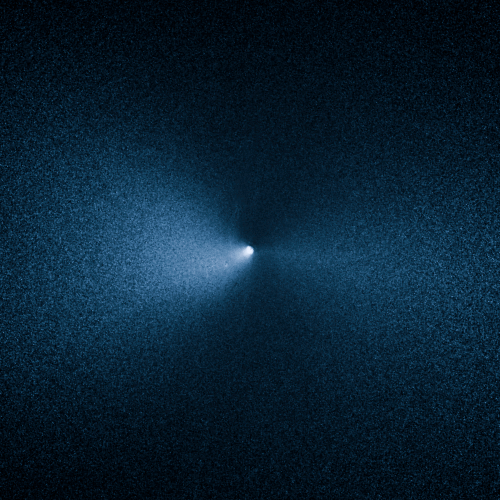

Comet 252P/LINEAR

This image taken by the NASA/ESA Hubble Space Telescope shows Comet 252P/LINEAR as it passed by Earth. The visit was one of the closest encounters between a comet and our planet.

Credit: NASA, ESA, and J.-Y. Li (Planetary Science Institute)